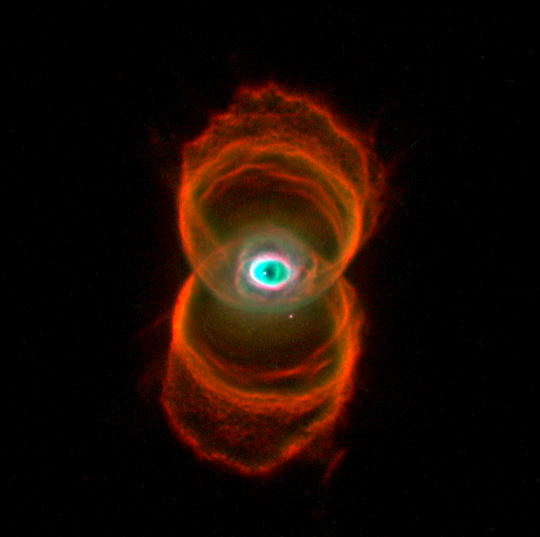

The Hourglass Nebula

This is an image of MyCn18, a young planetary nebula located about 8,000 light-years away, taken with the Wide Field and Planetary Camera 2 (WFPC2) aboard the Hubble Space Telescope (HST).

This Hubble image reveals the true shape of MyCn18 to be an hourglass with an intricate pattern of 'etchings' in its walls. This picture has been composed from three separate images taken in the light of ionized nitrogen (represented by red), hydrogen (green), and doubly-ionized oxygen (blue).

The results are of great interest because they shed new light on the poorly understood ejection of stellar matter which accompanies the slow death of Sun-like stars. In previous ground-based images, MyCn18 appears to be a pair of large outer rings with a smaller central one, but the fine details cannot be seen.

Credit: Raghvendra Sahai and John Trauger (JPL), the WFPC2 science team, and NASA/ESA